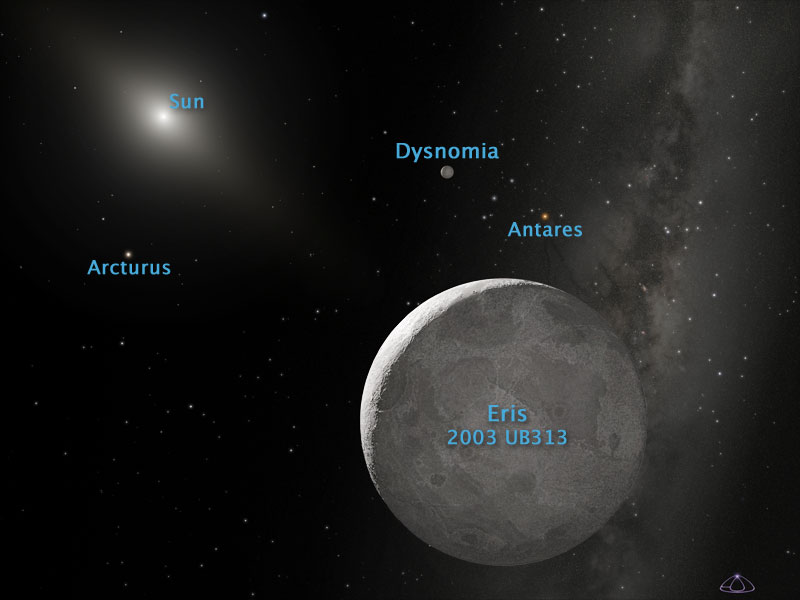

Artist's view of Eris and Dysnomia (Annotated)

Eris is 1.27 times the mass of Pluto, and is the largest member of a new class of dwarf planets in our solar system.

Credit: NASA, ESA, and Adolph Schaller (for STScI)